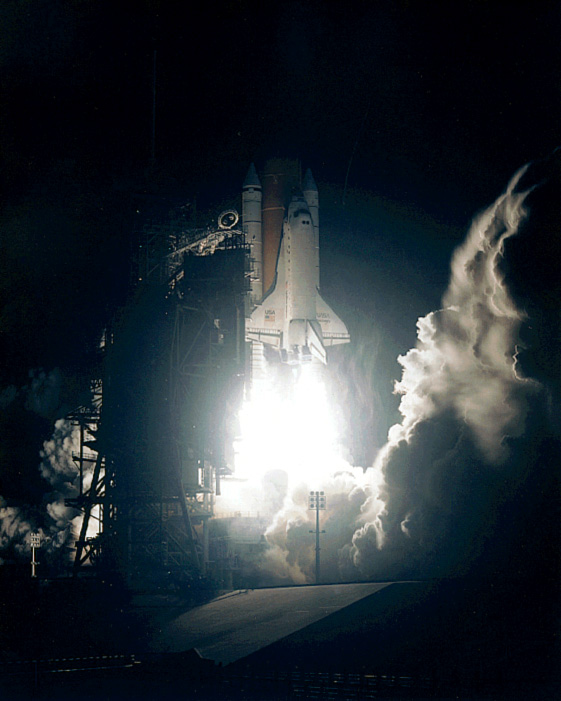

SM2: Discovery Liftoff

The Space Shuttle Discovery is on its way to Hubble, where astronauts are going to perform the second Servicing Mission - SM2.

Credit: NASA/ESA